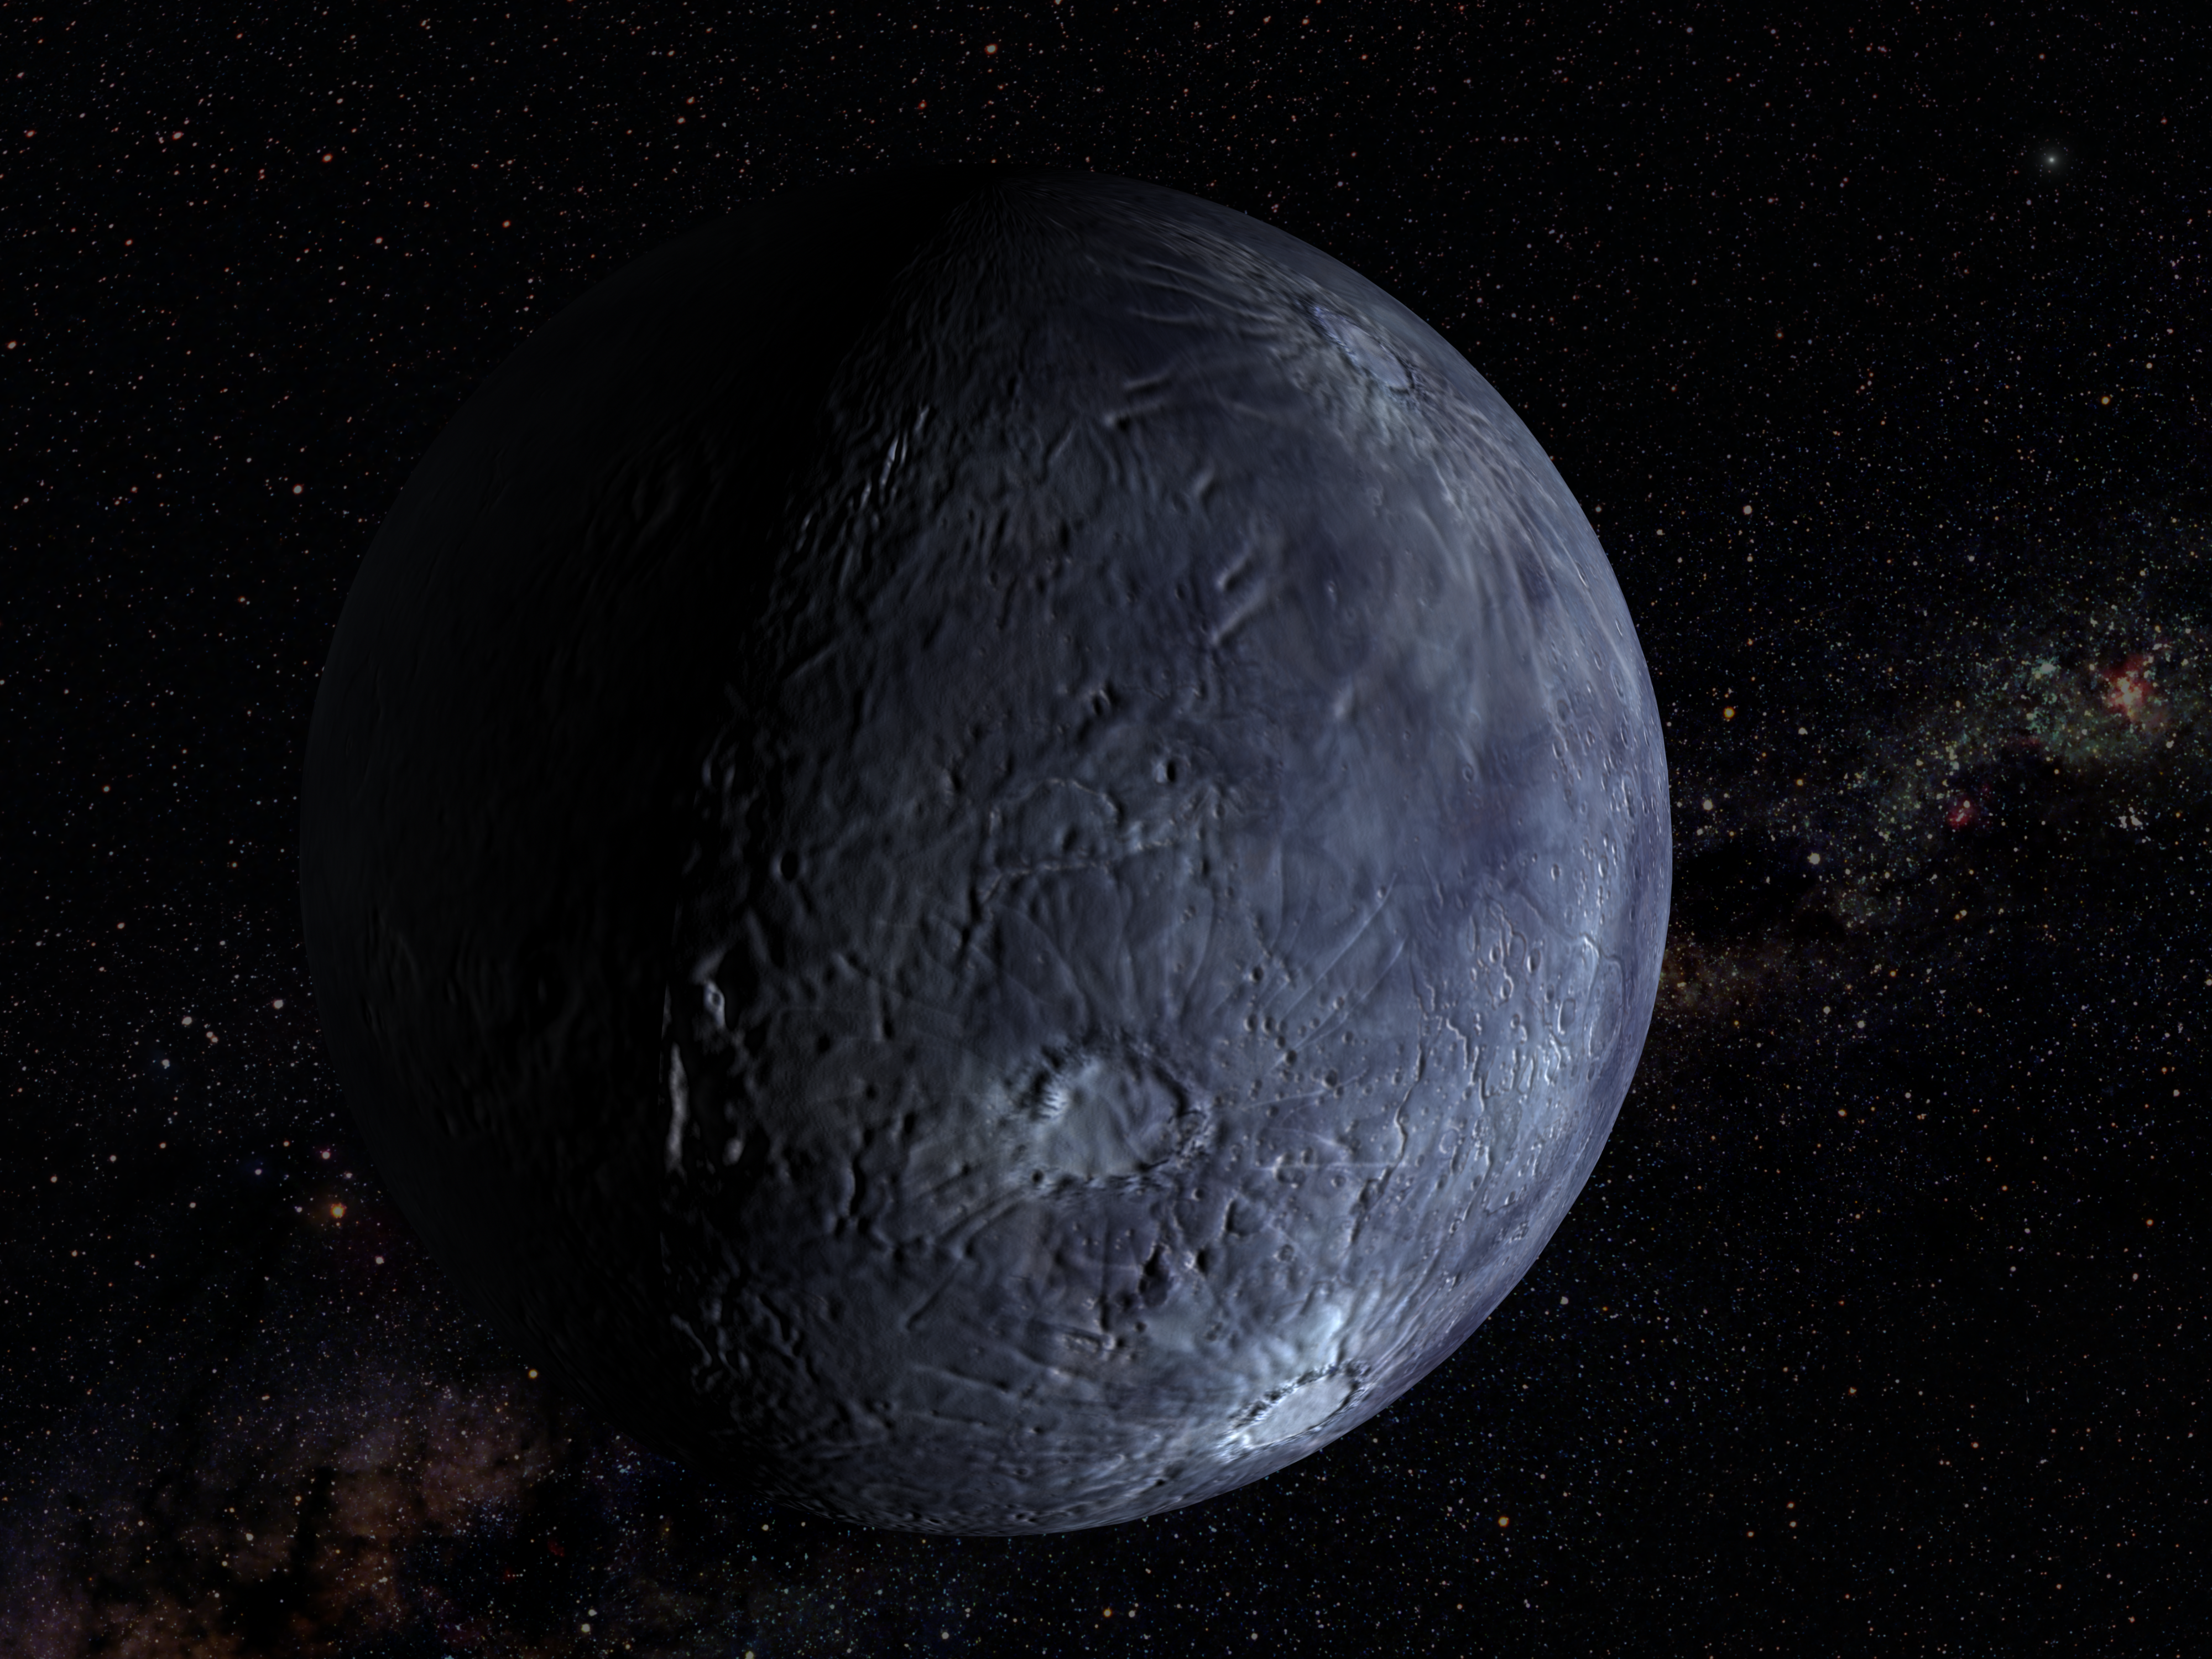

Hubble Spots an Icy World Far Beyond Pluto (artist's impression)

The NASA/ESA Hubble Space Telescope has measured the largest object in the solar system ever seen since the discovery of Pluto 72 years ago. Approximately half the size of Pluto, the icy world is called 'Quaoar' (pronounced kwa-whar). Quaoar is about 4 billion miles away (about 6.4 billion kilometres away), more than a billion miles farther than Pluto. Like Pluto, Quaoar dwells in the Kuiper belt, an icy belt of comet-like bodies extending 7 billion miles beyond Neptune's orbit.

Credit: NASA/ESA and M. Brown (Caltech)